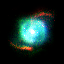

SMP 10 in the Large Magellanic Cloud

In the pictures of the planetary nebulae, colour corresponds to temperature. Blue represents hotter regions of the nebulae and red, cooler. Scientists are probing these illuminated stellar relics in our neighboring galaxy because they are at relatively the same distance - about 168, 000 light-years -- from Earth. Knowing the distance to these objects allows scientists to compare their shapes and sizes, and precisely determine the brightness of their central stars. For this reason, even though these glowing remains of dying stars are about 50 times farther away than the stunning planetary nebulae photographed in the Milky Way, they are of invaluable importance.

Credit: NASA/ESA; L. Stanghellini, R. Shaw, C. Blades, and M. Mutchler, Space Telescope Science Institute, Baltimore, Md.; and B. Balick, University of Washington, Seattle.